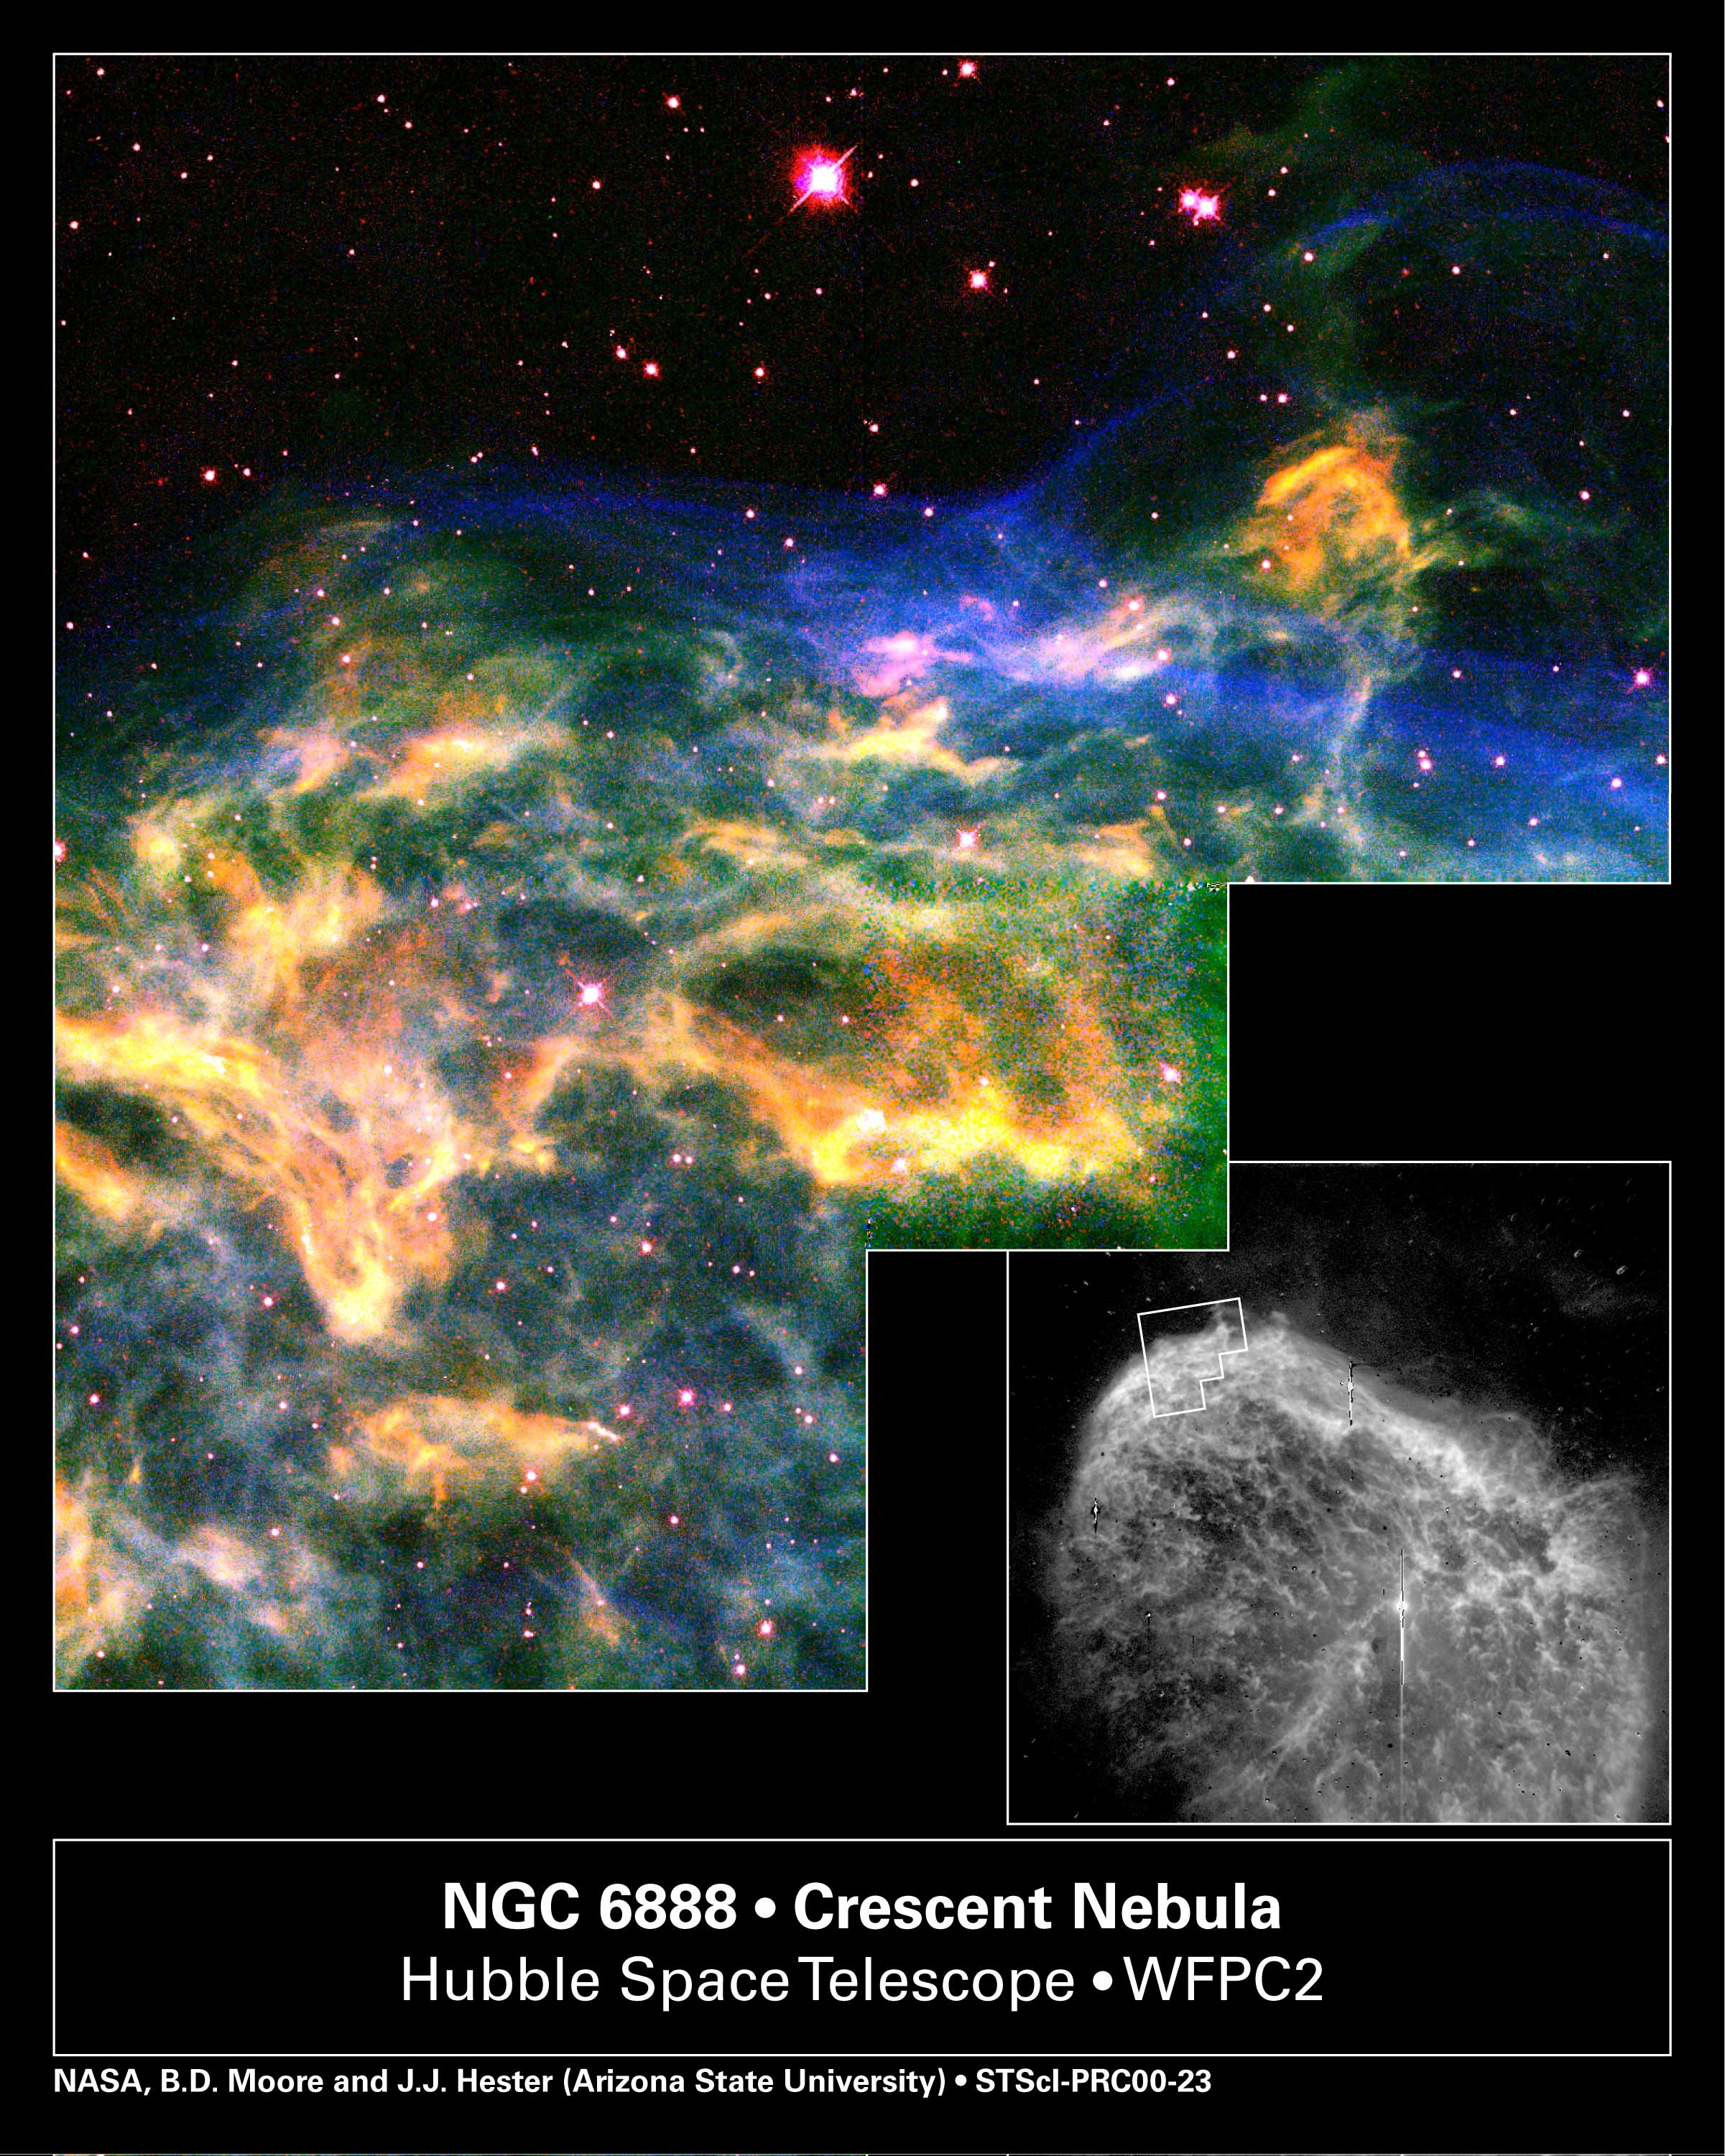

The Crescent Nebula

The Hubble telescope has snapped a view of a stellar demolition zone in our Milky Way Galaxy: a massive star, nearing the end of its life, tearing apart the shell of surrounding material it blew off 250, 000 years ago with its strong stellar wind. The shell of material, dubbed the Crescent Nebula (NGC 6888), surrounds the 'hefty, ' aging star WR 136, an extremely rare and short-lived class of super-hot star called a Wolf-Rayet.

Credit: Brian D. Moore, Jeff Hester, Paul Scowen, Reginald Dufour and NASA/ESA